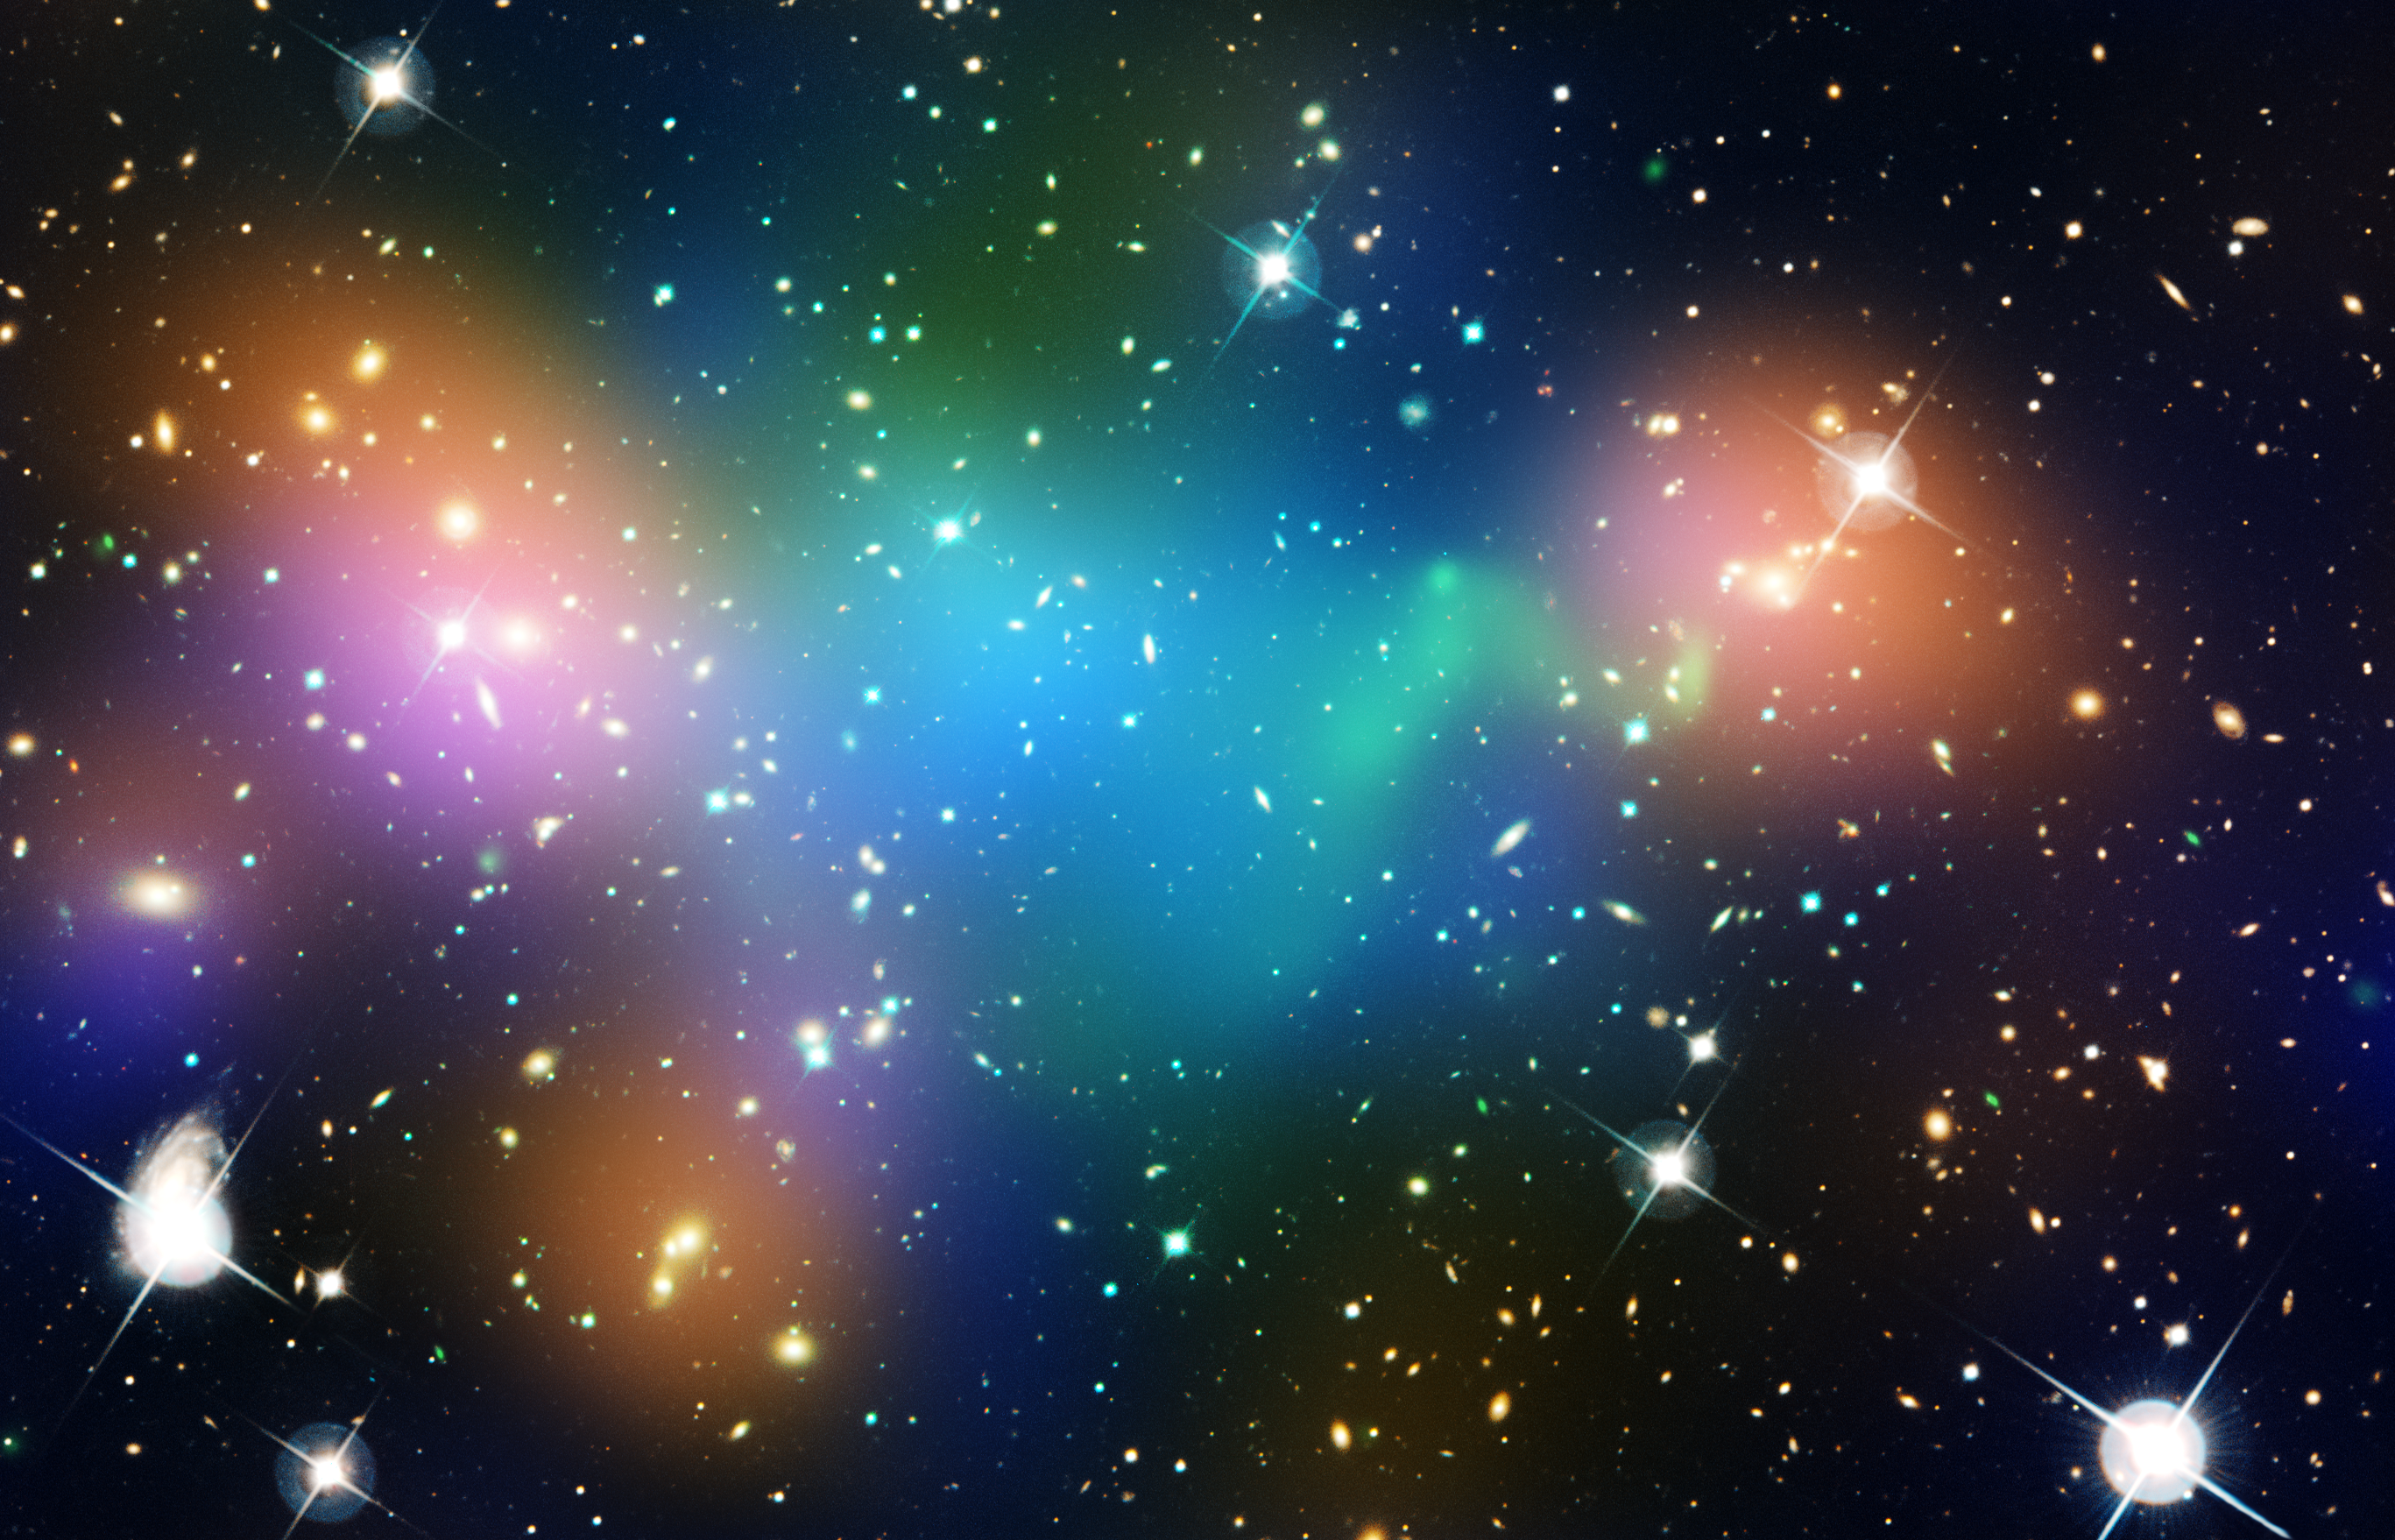

Merging galaxy cluster Abell 520

This composite image shows the distribution of dark matter, galaxies, and hot gas in the core of the merging galaxy cluster Abell 520, formed from a violent collision of massive galaxy clusters.

The natural-colour image of the galaxies was taken with the NASA/ESA Hubble Space Telescope and with the Canada-France-Hawaii Telescope in Hawaii.

Superimposed on the image are "false-coloured" maps showing the concentration of starlight, hot gas, and dark matter in the cluster. Starlight from galaxies, derived from observations by the Canada-France-Hawaii Telescope, is coloured orange. The green-tinted regions show hot gas, as detected by NASA's Chandra X-ray Observatory. The gas is evidence that a collision took place. The blue-coloured areas pinpoint the location of most of the mass in the cluster, which is dominated by dark matter. Dark matter is an invisible substance that makes up most of the Universe's mass. The dark-matter map was derived from the Hubble Wide Field Planetary Camera 2 observations by detecting how light from distant objects is distorted by the cluster of galaxies, an effect called gravitational lensing.

The blend of blue and green in the centre of the image reveals that a clump of dark matter resides near most of the hot gas, where very few galaxies are found. This finding confirms previous observations of a dark-matter core in the cluster. The result could present a challenge to basic theories of dark matter, which predict that galaxies should be anchored to dark matter, even during the shock of a collision.

Abell 520 resides 2.4 billion light-years away.

Credit: NASA, ESA, CFHT, CXO, M.J. Jee (University of California, Davis), and A. Mahdavi (San Francisco State University)